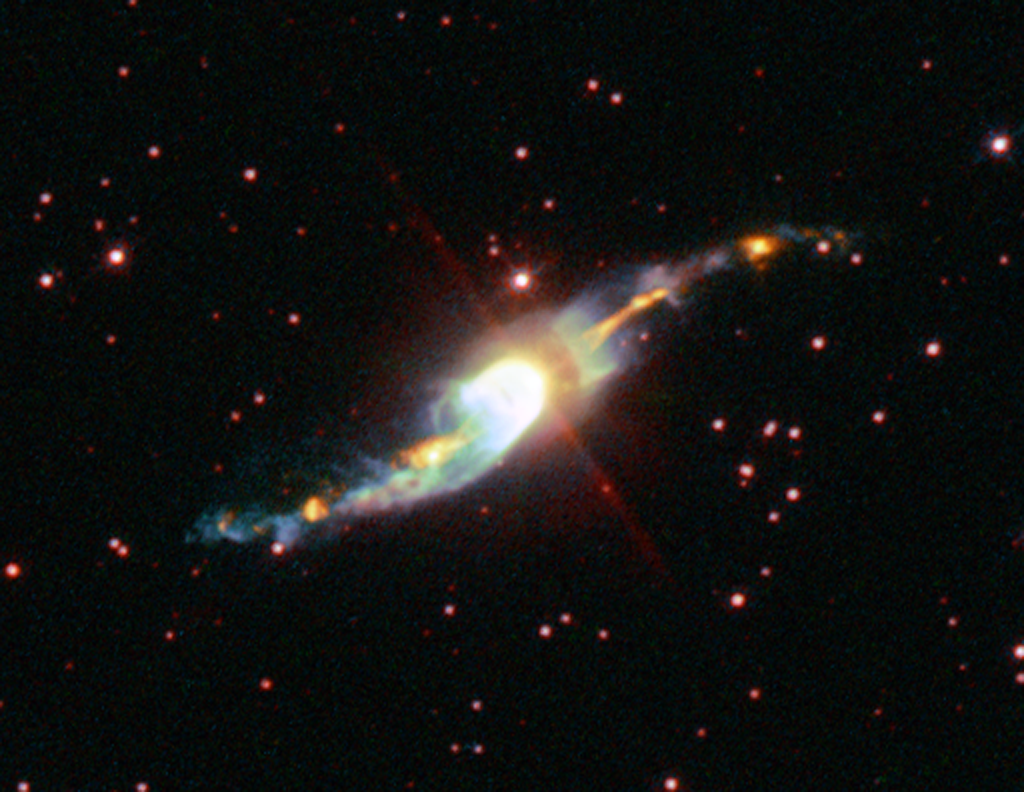

The mysterious 'Garden-sprinkler' nebula

There are many mysterious objects seen in the night sky which are not really well understood. For example, astronomers are puzzled by the 'jets' emerging from planetary nebulae. However, the S-shaped jet from Henize 3-1475 is the most perplexing of all. 'Jets' are long outflows of fast-moving gas found near many objects in the Universe, such as around young stars, or coming from black holes, neutron stars, and planetary nebulae, for example. The NASA/ESA Hubble Space Telescope has imaged the young planetary nebula Henize 3-1475 and its bizarre jet. Astronomers have nicknamed it the 'Garden-sprinkler' Nebula.

Credit: European Space Agency, A. Riera (Universitat Politecnica de Catalunya, Spain) and P. Garcia-Lario (European Space Agency ISO Data Centre, Spain)